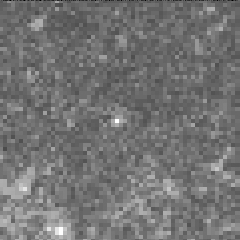

Cepheid variable star in galaxy M100

The interval it takes for the Cepheid to complete one pulsation is a direct indication of the stars's intrinsic brightness. This value can be used to make a precise measurement of the galaxy's distance, which turns out to be 56 million light-years from Earth. This image was taken on May 31 1994.

Credit: Dr. Wendy L. Freedman, Observatories of the Carnegie Institution of Washington, and NASA/ESA